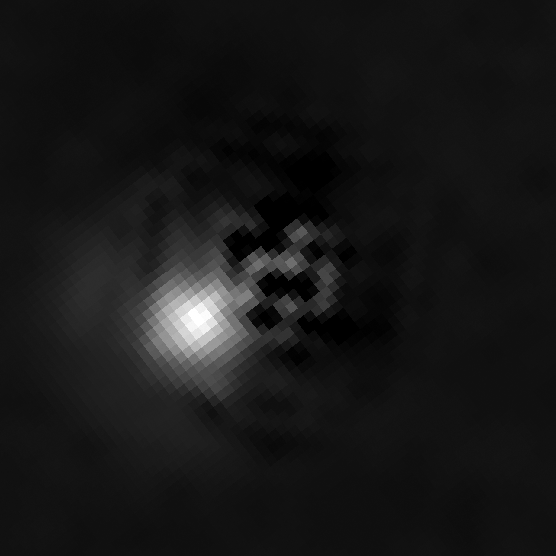

Brown dwarf 2M J044144 with companion (subtracted image)

Brown dwarf 2M J044144 with companion (subtracted image). Image taken with Hubble's Wide Field Planetary Camera 2 on 10 August 2008.

Credit: NASA, ESA, K. Todorov and K. Luhman (Penn State University)